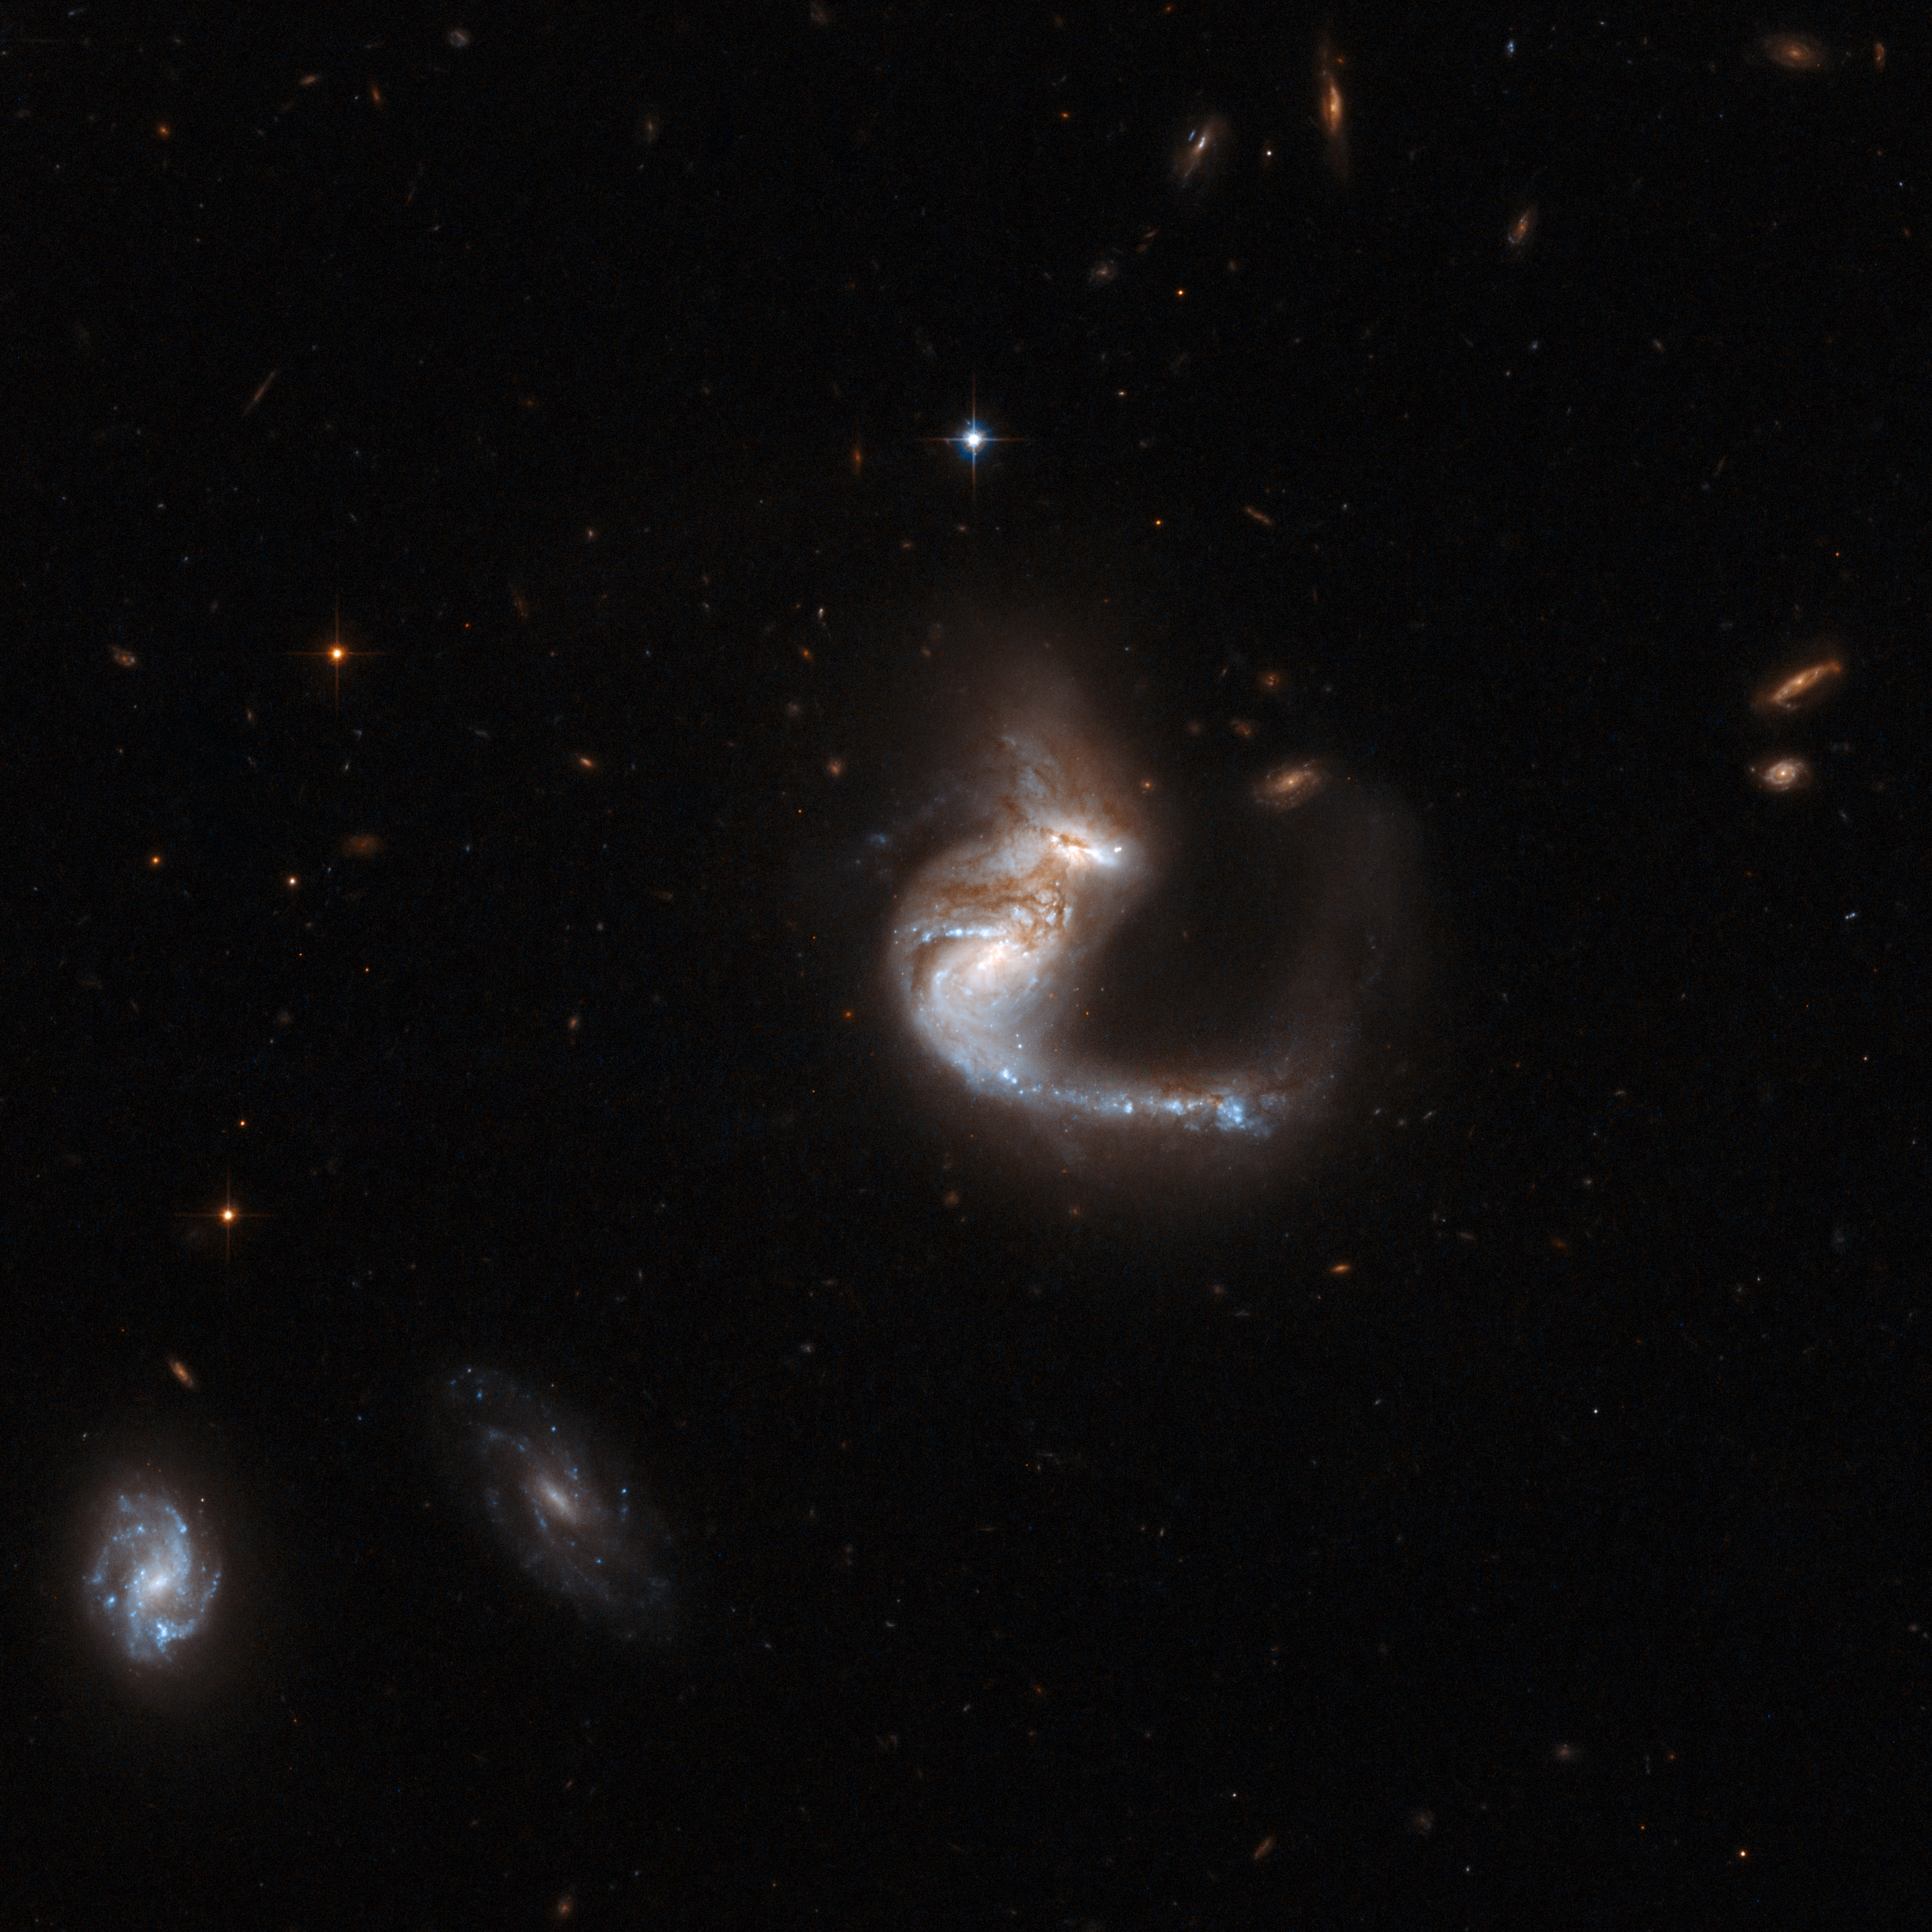

UGC 4881

UGC 4881, known as the "The Grasshopper", is a stunning system consisting of two colliding galaxies. It has a bright curly tail containing a remarkable number of star clusters. The galaxies are thought to be halfway through a merger - the cores of the parent galaxies are still clearly separated, but their discs are overlapping. A supernova exploded in this system in 1999 and astronomers believe that a vigorous burst of star formation may have just started. This notable object is located in the constellation of Lynx, some 500 million light-years away from Earth. UGC 4881 is the 55th galaxy in Arp's Atlas of Peculiar Galaxies.

This image is part of a large collection of 59 images of merging galaxies taken by the Hubble Space Telescope and released on the occasion of its 18th anniversary on 24th April 2008.

Credit: NASA, ESA, the Hubble Heritage Team (STScI/AURA)-ESA/Hubble Collaboration and A. Evans (University of Virginia, Charlottesville/NRAO/Stony Brook University)